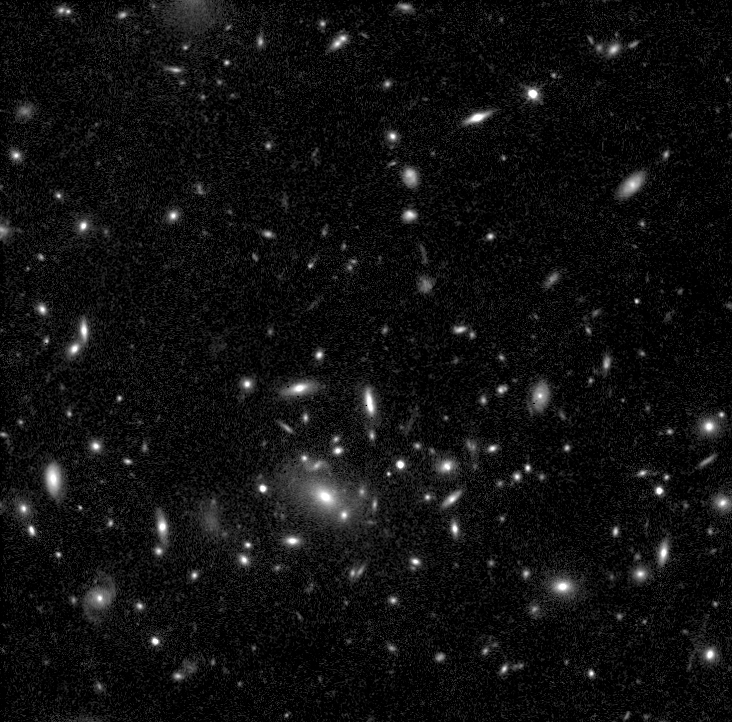

Supernova 1996cl in Distant Cluster

In March 1996, the Hubble Space Telescope's Wide Field and Planetary Camera 2 just happened to be pointed at the faraway galaxy cluster MS1054-0321 when it captured the light from an exploding star, called supernova 1996cl. The cluster is 8 billion light-years from Earth.

Credit: Saul Perlmutter of Lawrence Berkeley Laboratory in California